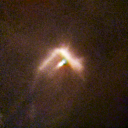

231-838

One of 42 new proplyds discovered in the Orion Nebula, 231-838 is one of the bright proplyds that lies relatively close to the nebula’s brightest star, Theta 1 Orionis C. Resembling a boomerang, this proplyd is surrounded by a shock wave that is caused by stellar wind from the massive Theta 1 Orionis C interacting with gas in the nebula.

Credit: NASA/ESA and L. Ricci (ESO)